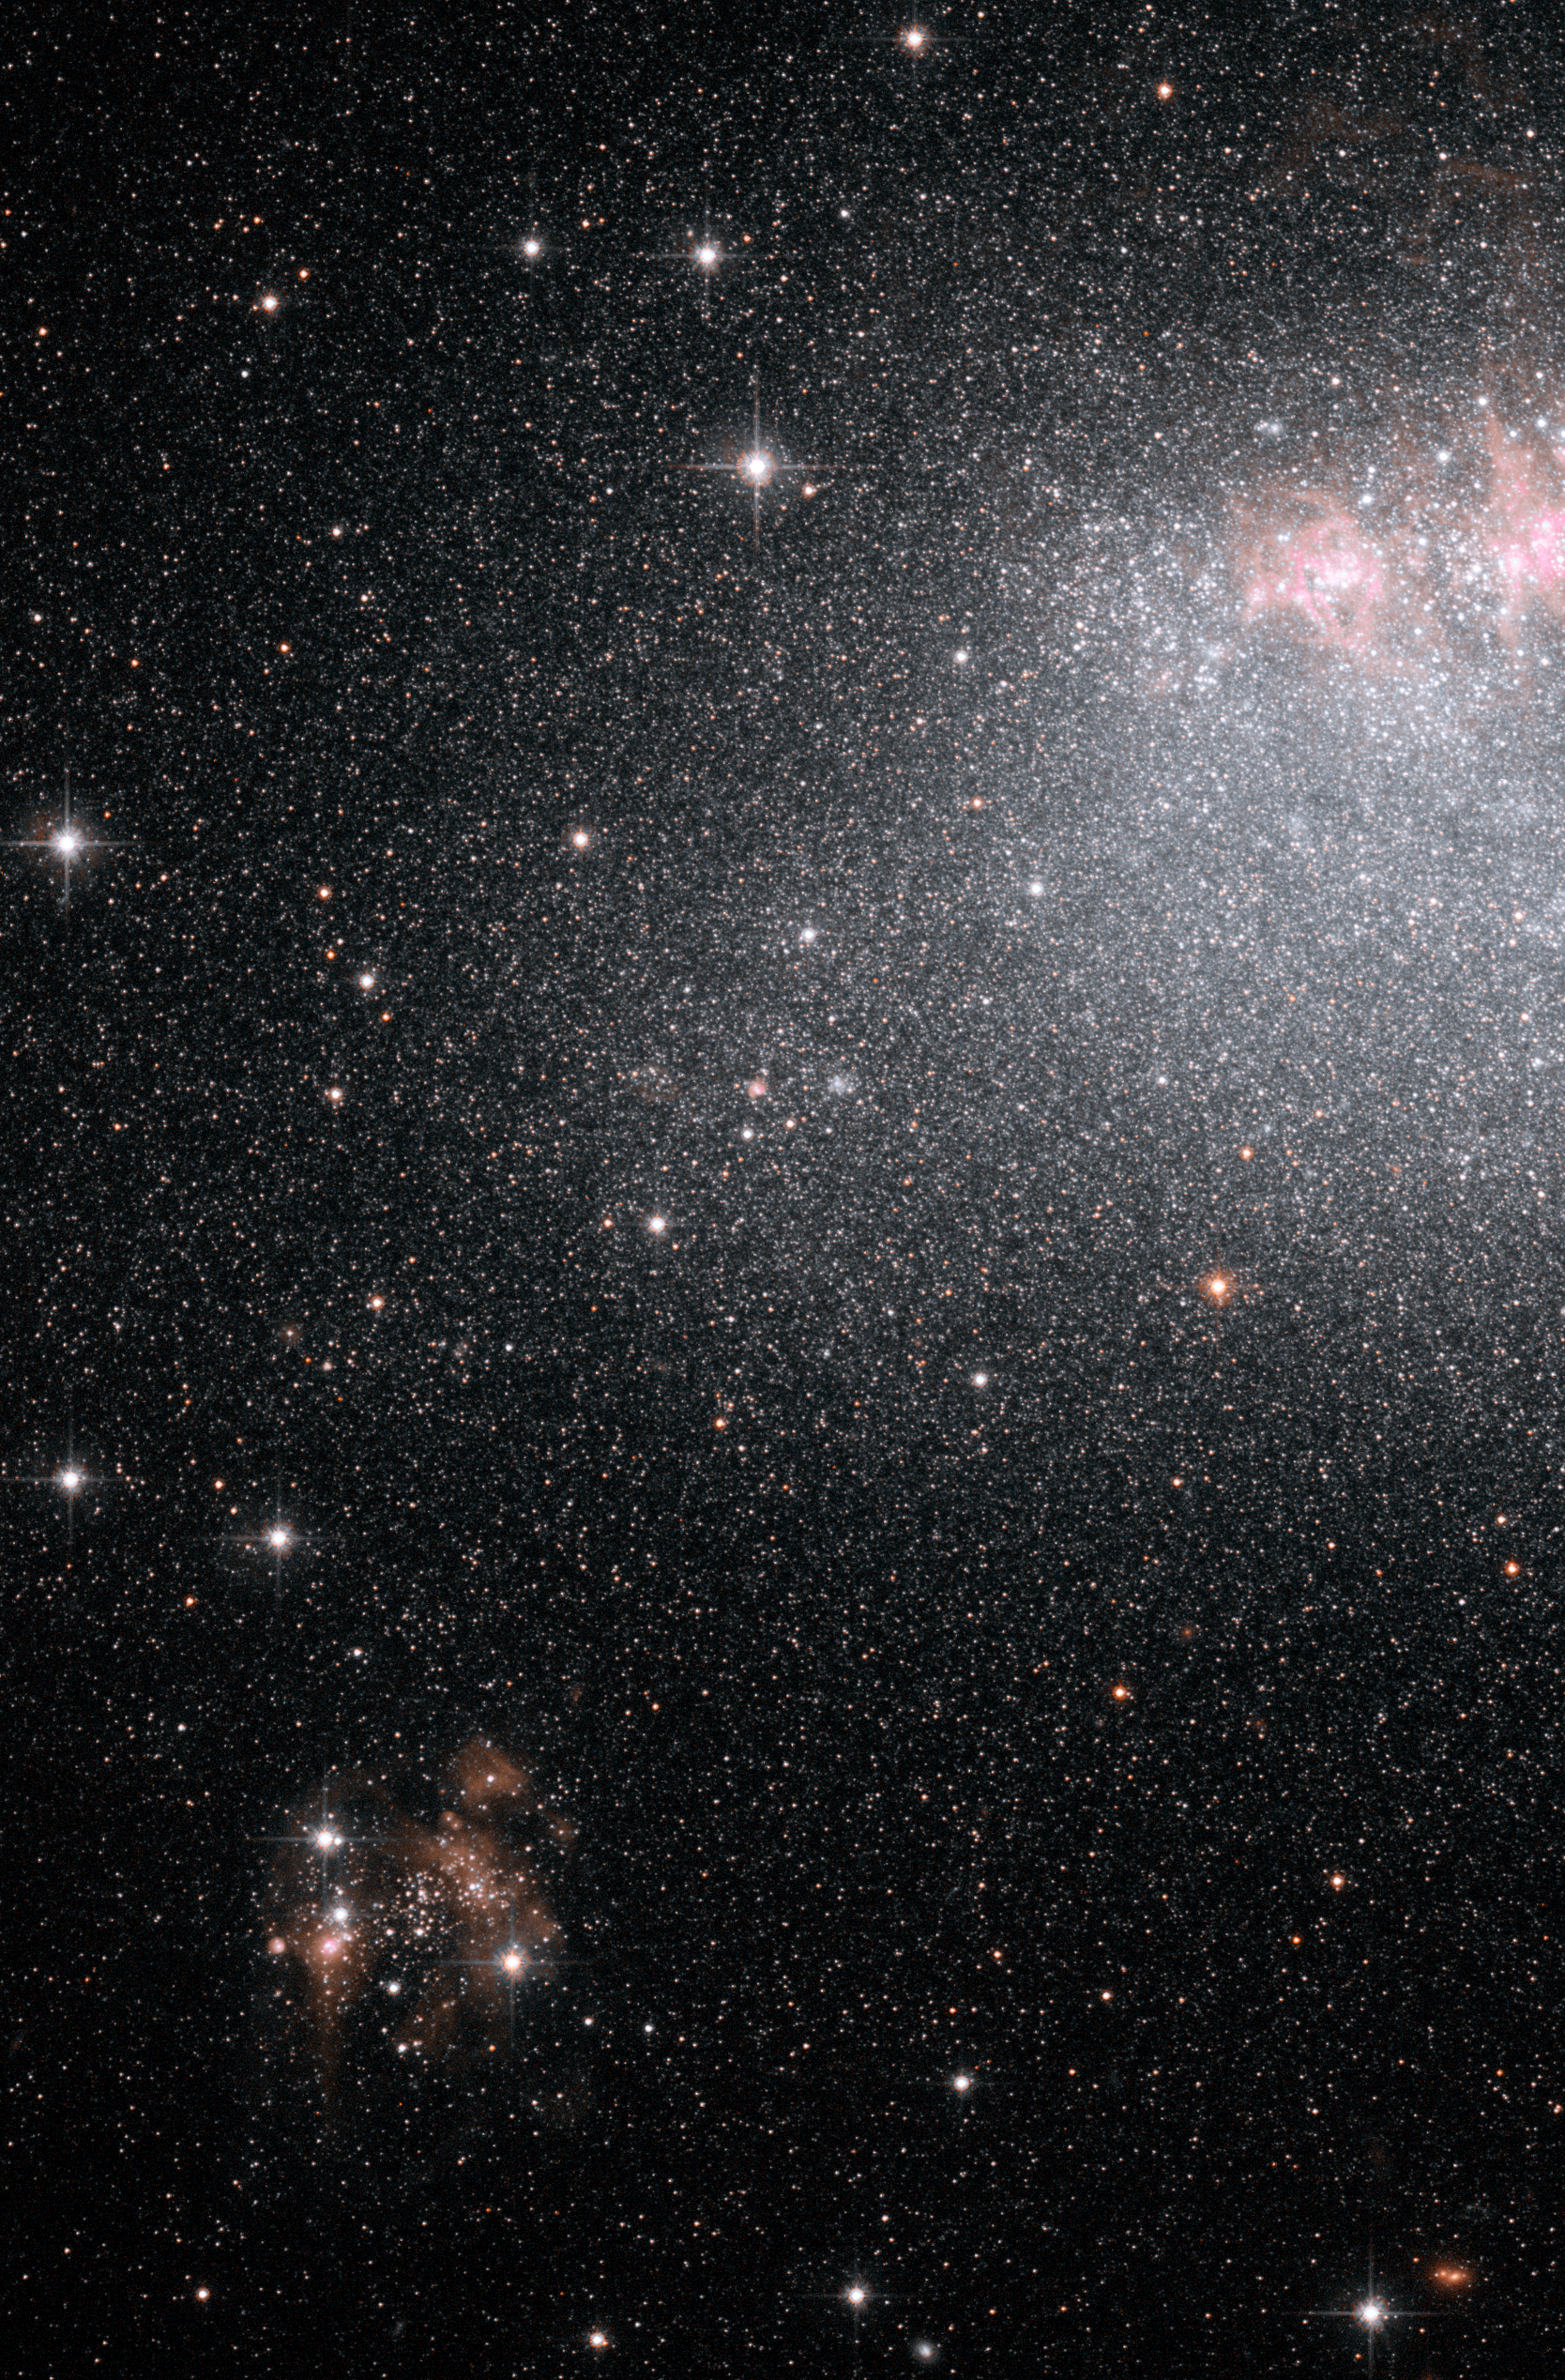

Hubble ACS image of IC 4662

This image, taken by the NASA/ESA Hubble Space Telescope, shows myriad stars residing in the central regions of the dwarf galaxy IC 4662. The bluish dots are younger stars; the reddish dots, older stars. The irregularly shaped red blobs are in regions of current starburst activity. One such region extends off the image's top, right edge.

IC 4662, located 8 million light years away in the Pavo constellation, is part of a Hubble study of starbursts in nearby, small, or dwarf, galaxies. Based on this study, astronomers have found that starbursts continue 100 times longer than first thought, lasting 200 million to 400 million years. These galaxies show that starbursts are not isolated events, but sweep across a galaxy.

Credit: NASA, ESA and K. McQuinn (University of Minnesota, Minneapolis)